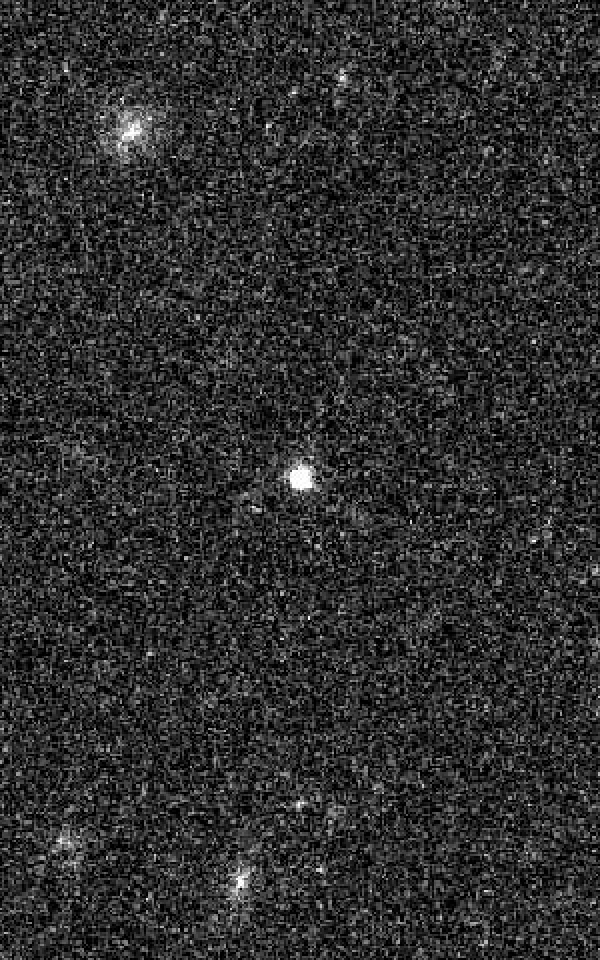

Optical transient SCP 06F6 - 21 May 2006

In 2006 the ESO/NASA Hubble Space Telescope observed an object, which brightend over a period of 100 days and then faded over a similar period. The spectrum of the light from the object did not fit any known supernova types. Even worse, astronomers were not able to trace back the few spectral lines in the light of the object to any known elements which made it impossible to determine the distance of the object. In addition neither a star of the Milky Way nor another galaxy was found at the location of the object.

The picture presented here was taken during the period, the object brightened up.

Astronomers came up with several explanations for the nature of SC 06F6: It was suggested that SCP 06F6 might be a supernova at an extreme distance. It would also be possible that Hubble observed the collision between an asteroid and a white star, or the collision of a white star and a black hole. Other ideas included the core collapse of a carbon star, a pair-instability supernova or even a complete new kind of supernova. However, the true nature of SCP 06F6 so far stays a mystery.

Credit: NASA, ESA and K. Barbary (University of California, Berkeley)